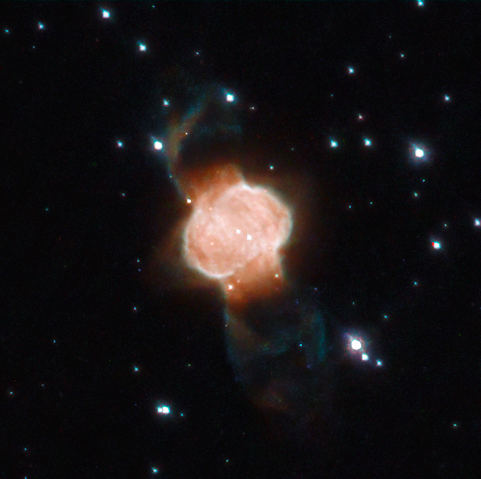

A Cosmic Hourglass

This week’s NASA/ESA Hubble Space Telescope Picture of the Week features an impressive portrait of M1-63, a beautifully captured example of a bipolar planetary nebula located in the constellation of Scutum (the Shield). A nebula like this one is formed when the star at its centre sheds huge quantities of material from its outer layers, leaving behind a spectacular cloud of gas and dust.

It is believed that a binary system of stars at the centre of the bipolar nebula is capable of creating hourglass or butterfly-like shapes like the one in this image. This is because the material from the shedding star is funnelled towards its poles, with the help of the companion, creating the distinctive double-lobed structure seen in nebulae such as M1-63.

Credit: ESA/Hubble & NASA, L. Stanghellini